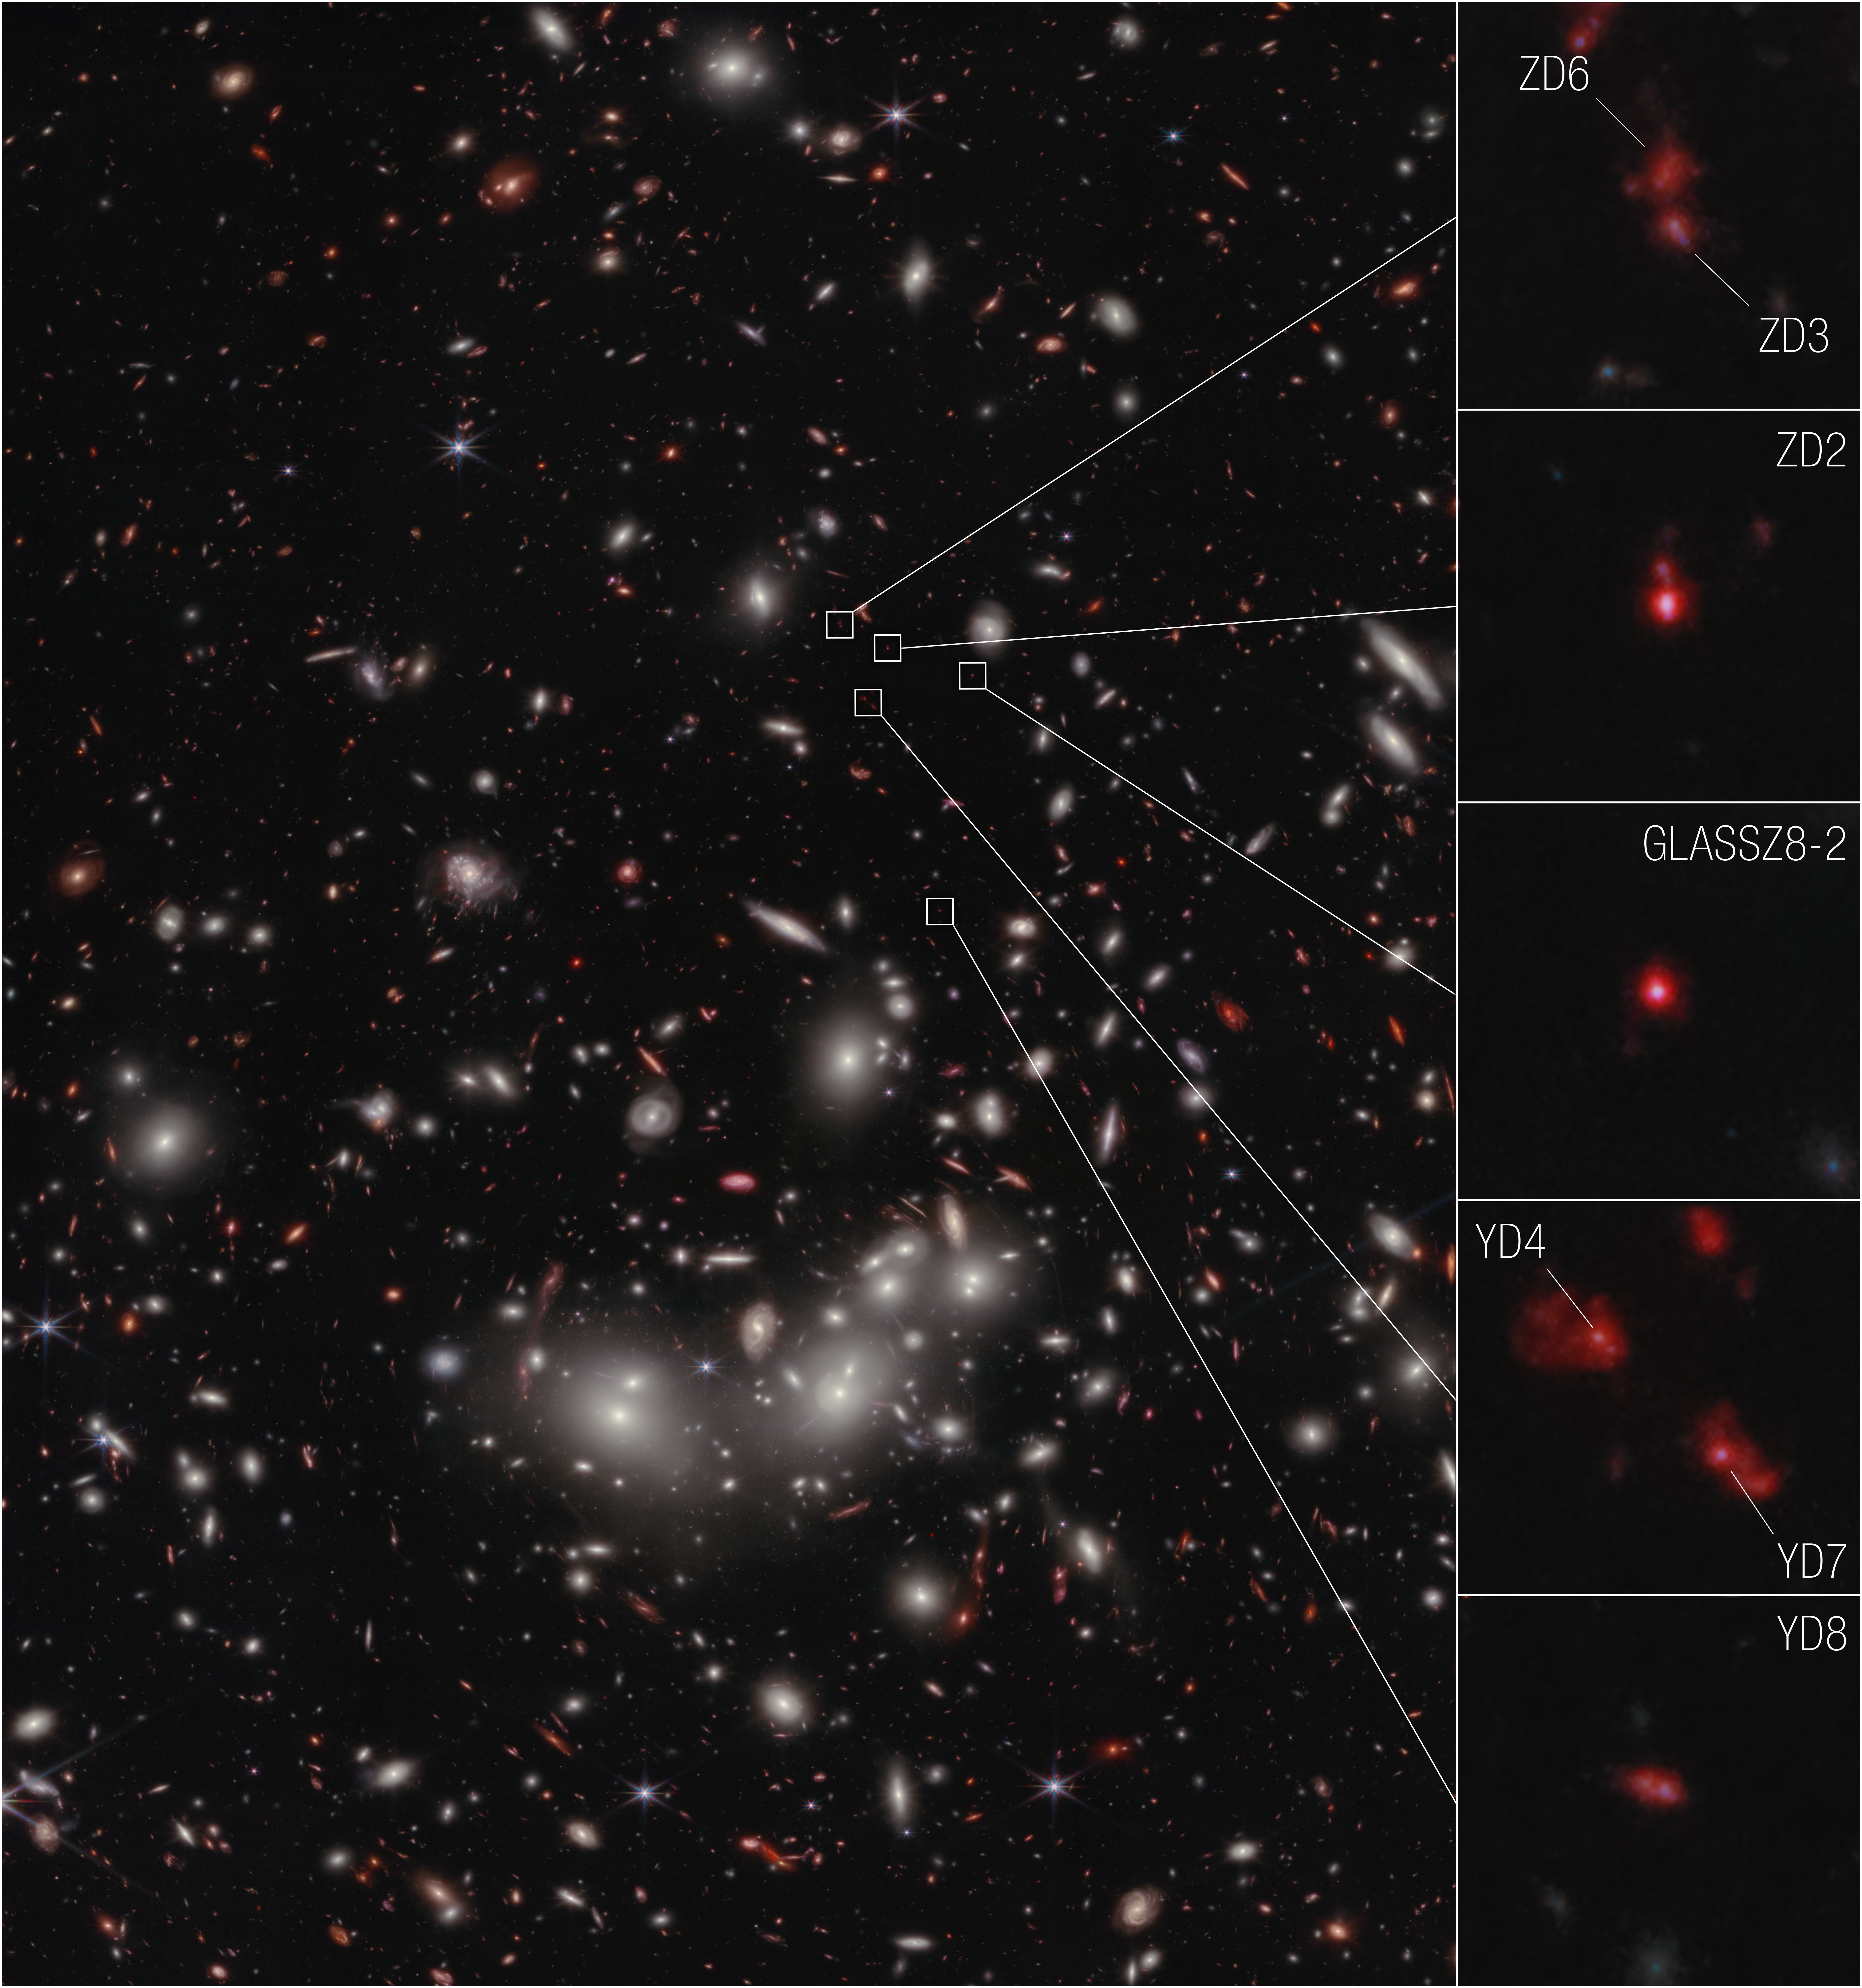

Webb reveals early-Universe prequel to huge galaxy cluster

The seven galaxies highlighted in this image from the NASA/ESA/CSA Telescope have been confirmed to be at a distance that astronomers refer to as redshift 7.9, which correlates to 650 million years after the big bang. This makes them the earliest galaxies yet to be spectroscopically confirmed as part of a developing cluster.

The seven galaxies confirmed by Webb were first established as candidates for observation using data from the NASA/ESA Hubble Space Telescope’s Frontier Fields program. The program dedicated Hubble time to observations using gravitational lensing, to observe very distant galaxies in detail. However, because Hubble cannot detect light beyond near-infrared, there is only so much detail it can see. Webb picked up the investigation, focusing on the galaxies scouted by Hubble and gathering detailed spectroscopic data in addition to imagery.

Astronomers used Webb's Near-Infrared Spectrograph (NIRSpec) instrument to precisely measure the distances and determine that the galaxies are part of a developing cluster. Galaxy YD4, previously estimated to be at a further distance based on imaging data alone, was able to be more accurately placed at the same redshift as the other galaxies. Before Webb, astronomers did not have high resolution imaging or spectral infrared data available to do this type of science.

At extreme distances, astronomers use the redshift reference to account for the fact that, as the universe expands, wavelengths of light are stretched and “shifted” to redder wavelengths, which are longer. Shorter wavelengths, for example ultraviolet and X-ray, are toward the bluer end of the electromagnetic spectrum. So extreme distances in the early universe are referenced by how much the light emitted there has been shifted as it travelled through space to be detected by a telescope.

The results have been published in the Astrophysical Journal Letters.

Credit: NASA, ESA, CSA, T. Morishita (IPAC), A. Pagan (STScI)